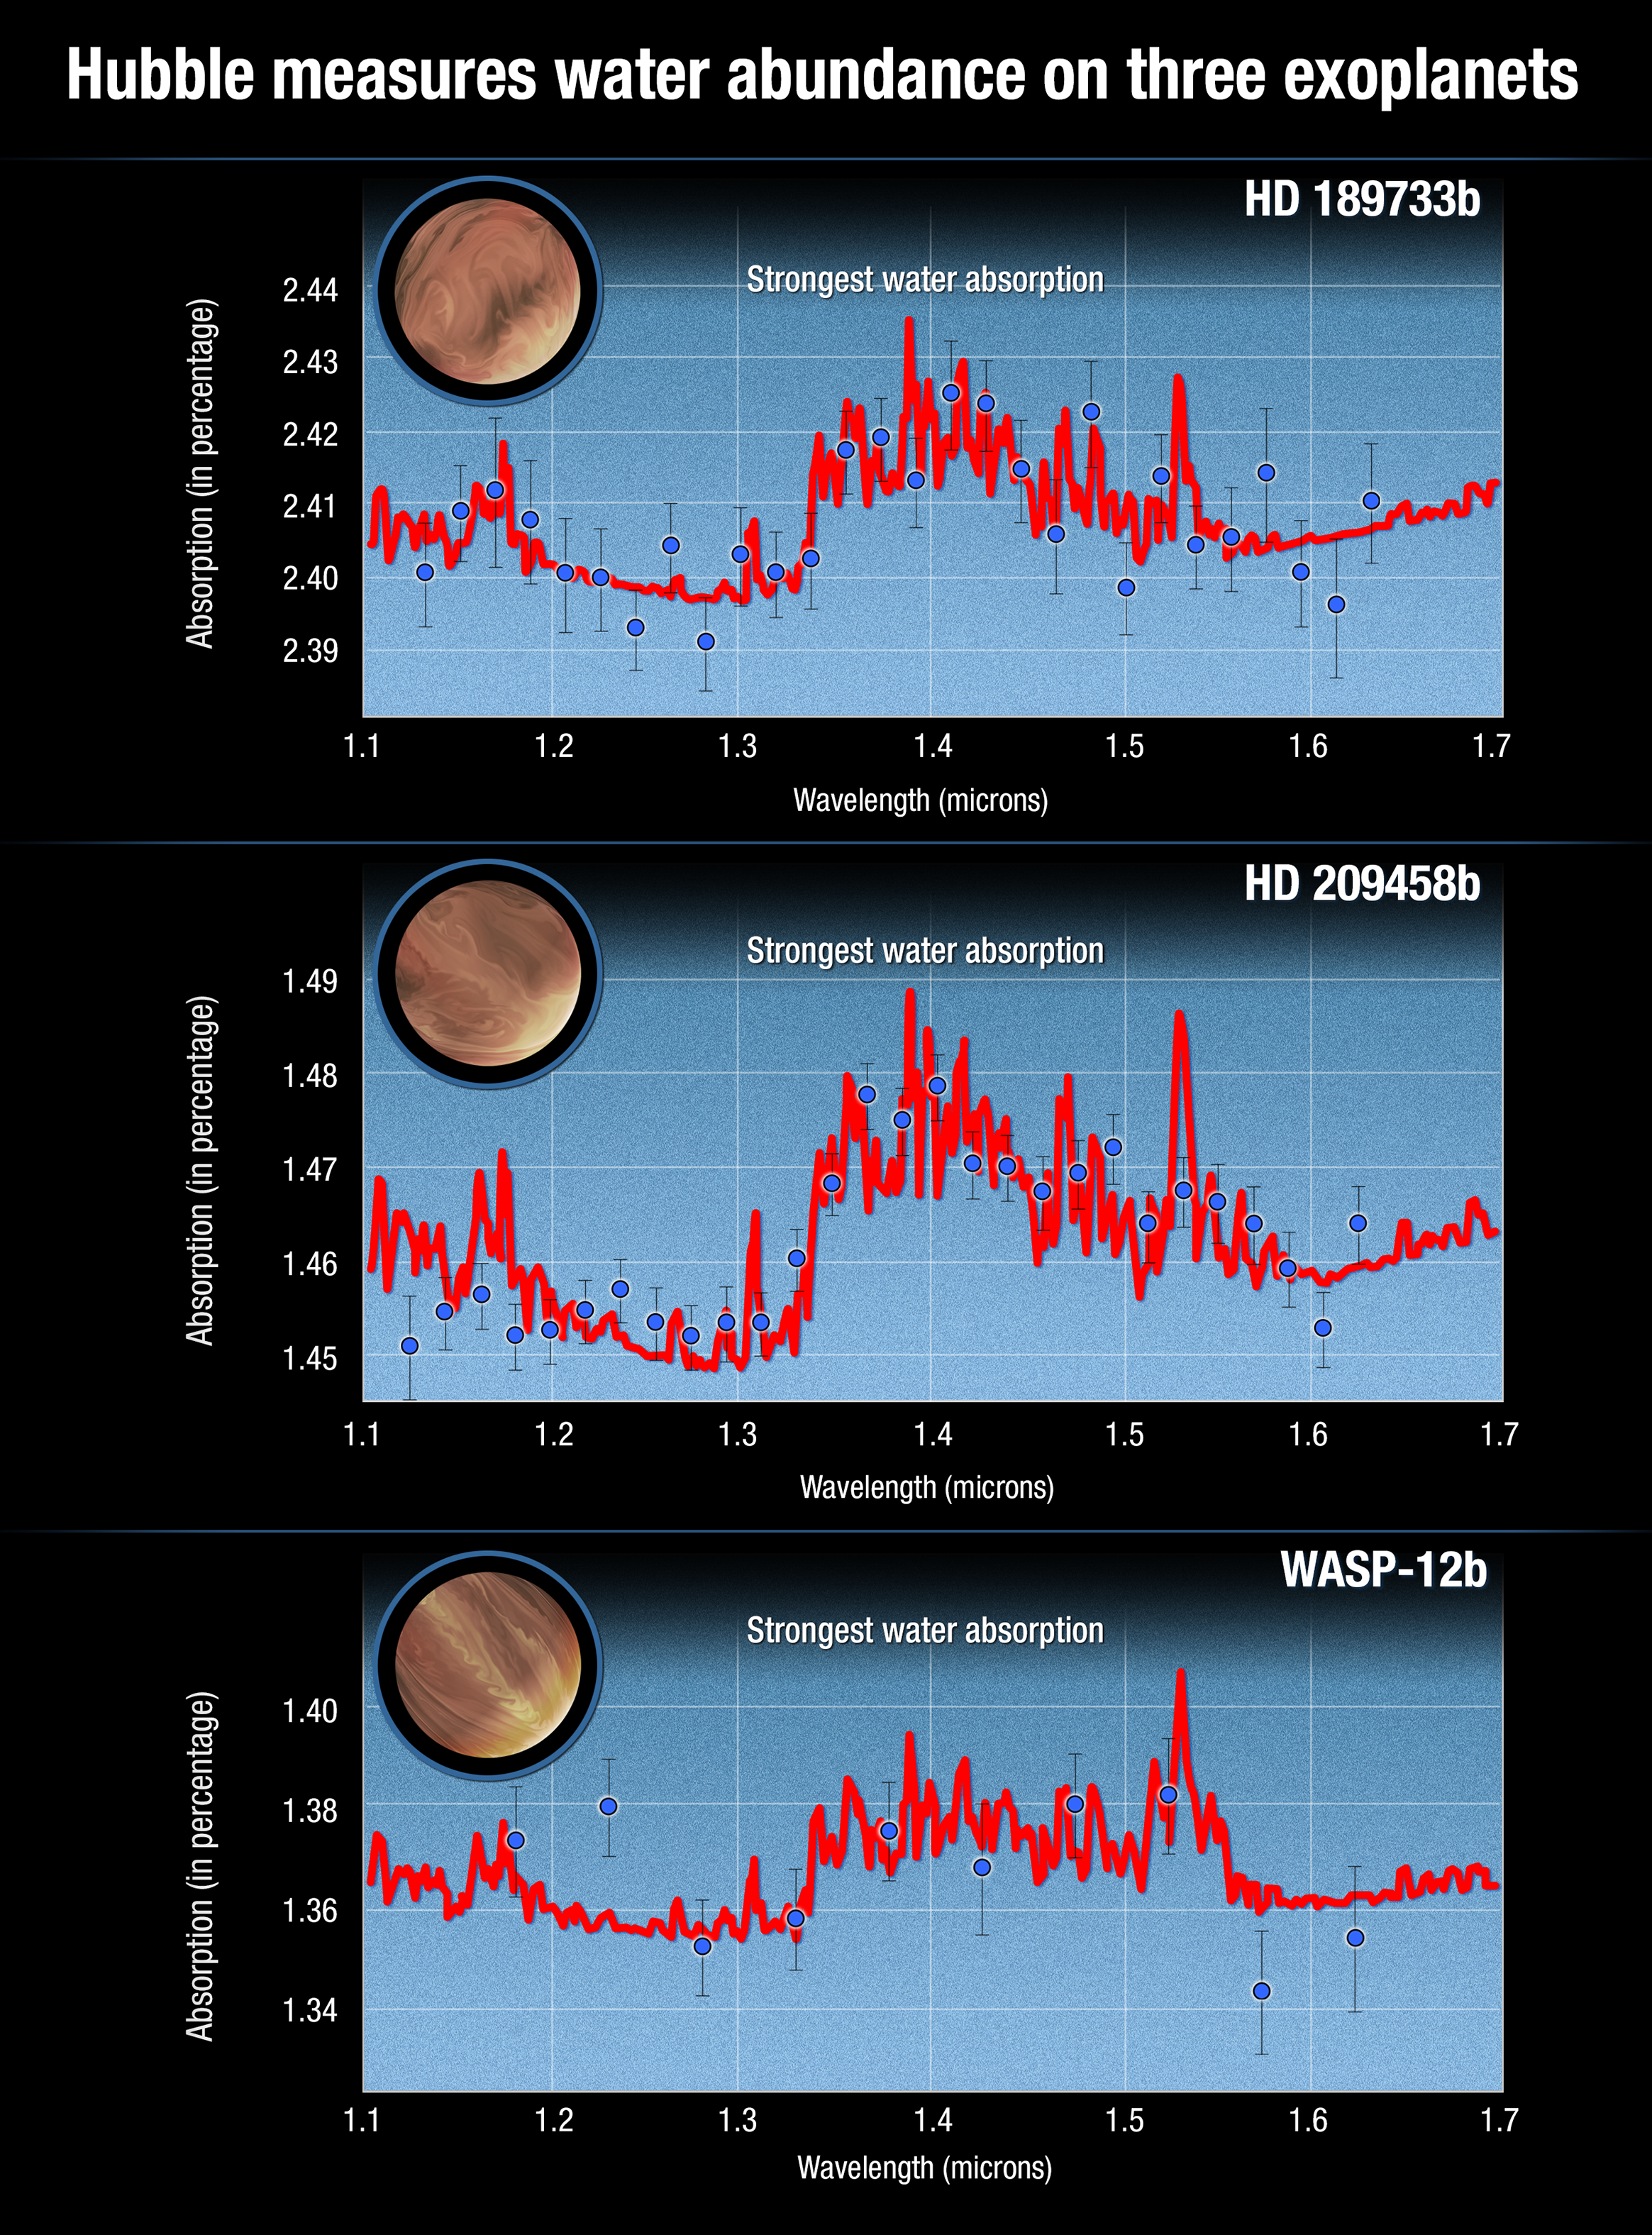

Atmospheric spectra of three hot Jupiters showing water absorption

This graph compares observations with modeled infrared spectra for three hot-Jupiter-class exoplanets. These exoplanets were spectroscopically observed with the NASA/ESA Hubble Space Telescope. The red curve in each case is the best-fit model spectrum for the detection of water vapor absorption in the planetary atmosphere. The blue circles and error bars show the processed and analysed data from Hubble's spectroscopic observations.

Credit: NASA, ESA, N. Madhusudhan (University of Cambridge), and A. Feild and G. Bacon (STScI)